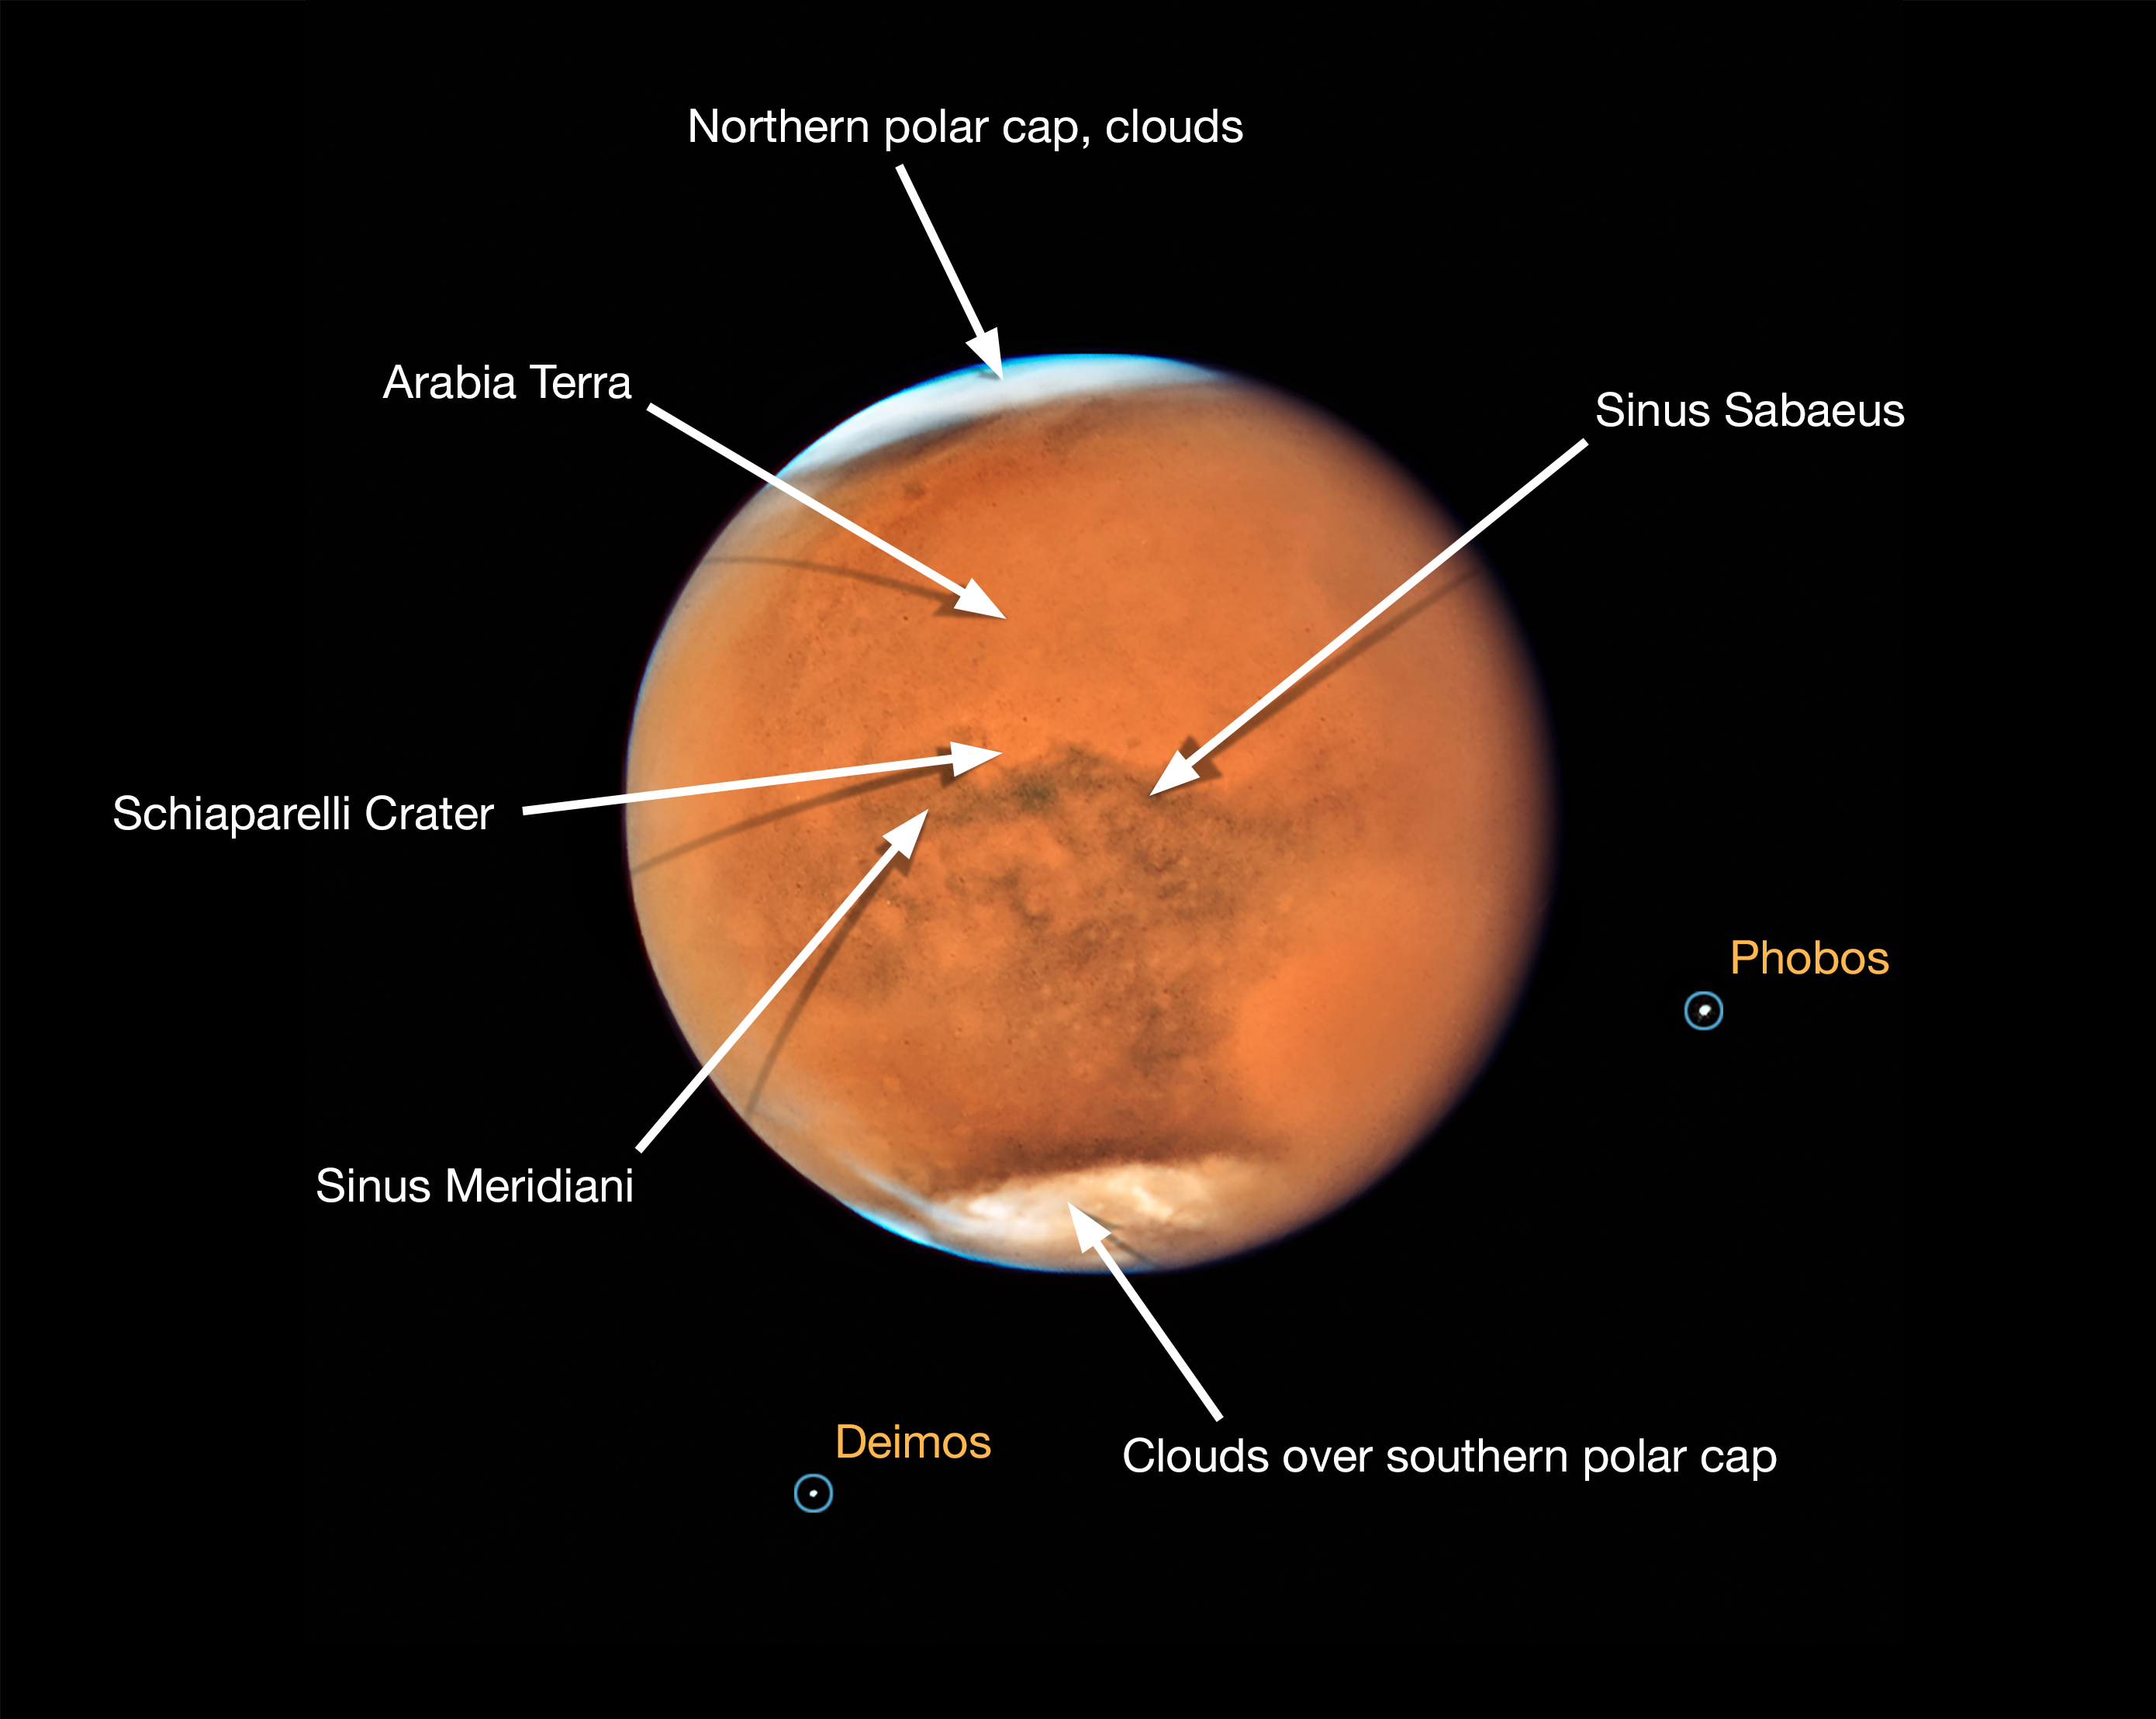

Mars in opposition in 2018 (annotated)

This annotated image of Mars shows features of the planet that were visible in summer 2018 despite a global dust storm. During the time of observation it was spring in Mars’ southern hemisphere, where a dust storm erupted and ballooned into a global event that is blanketing the entire planet. Even so, several distinctive features can be identified.

The large oval area at the lower right is the bright Hellas Basin. About 2200 kilometres across and nearly eight kilometres deep, it was formed about four billion years ago by an asteroid impact. Many global dust storms originate in this region.

The orange area in the upper centre of the image is Arabia Terra, a vast upland region in northern Mars. The landscape is densely cratered and heavily eroded, indicating that it could be among the oldest terrains on the planet.

South of Arabia Terra, running east to west along the equator, are the long dark features known as Sinus Sabaeus and Sinus Meridiani. These regions are covered by dark bedrock and fine-grained sand deposits ground down from ancient lava flows and other volcanic features. These sand grains are coarser and less reflective than the fine dust that gives the brighter regions of Mars their rusty appearance.

Because it is autumn in the northern hemisphere, a bright blanket of clouds covers the north polar region. Clouds also can be seen over the southern polar cap.

The two small moons of Mars, Phobos and Deimos, appear in the lower half of the image.

Credit: NASA, ESA, and STScI